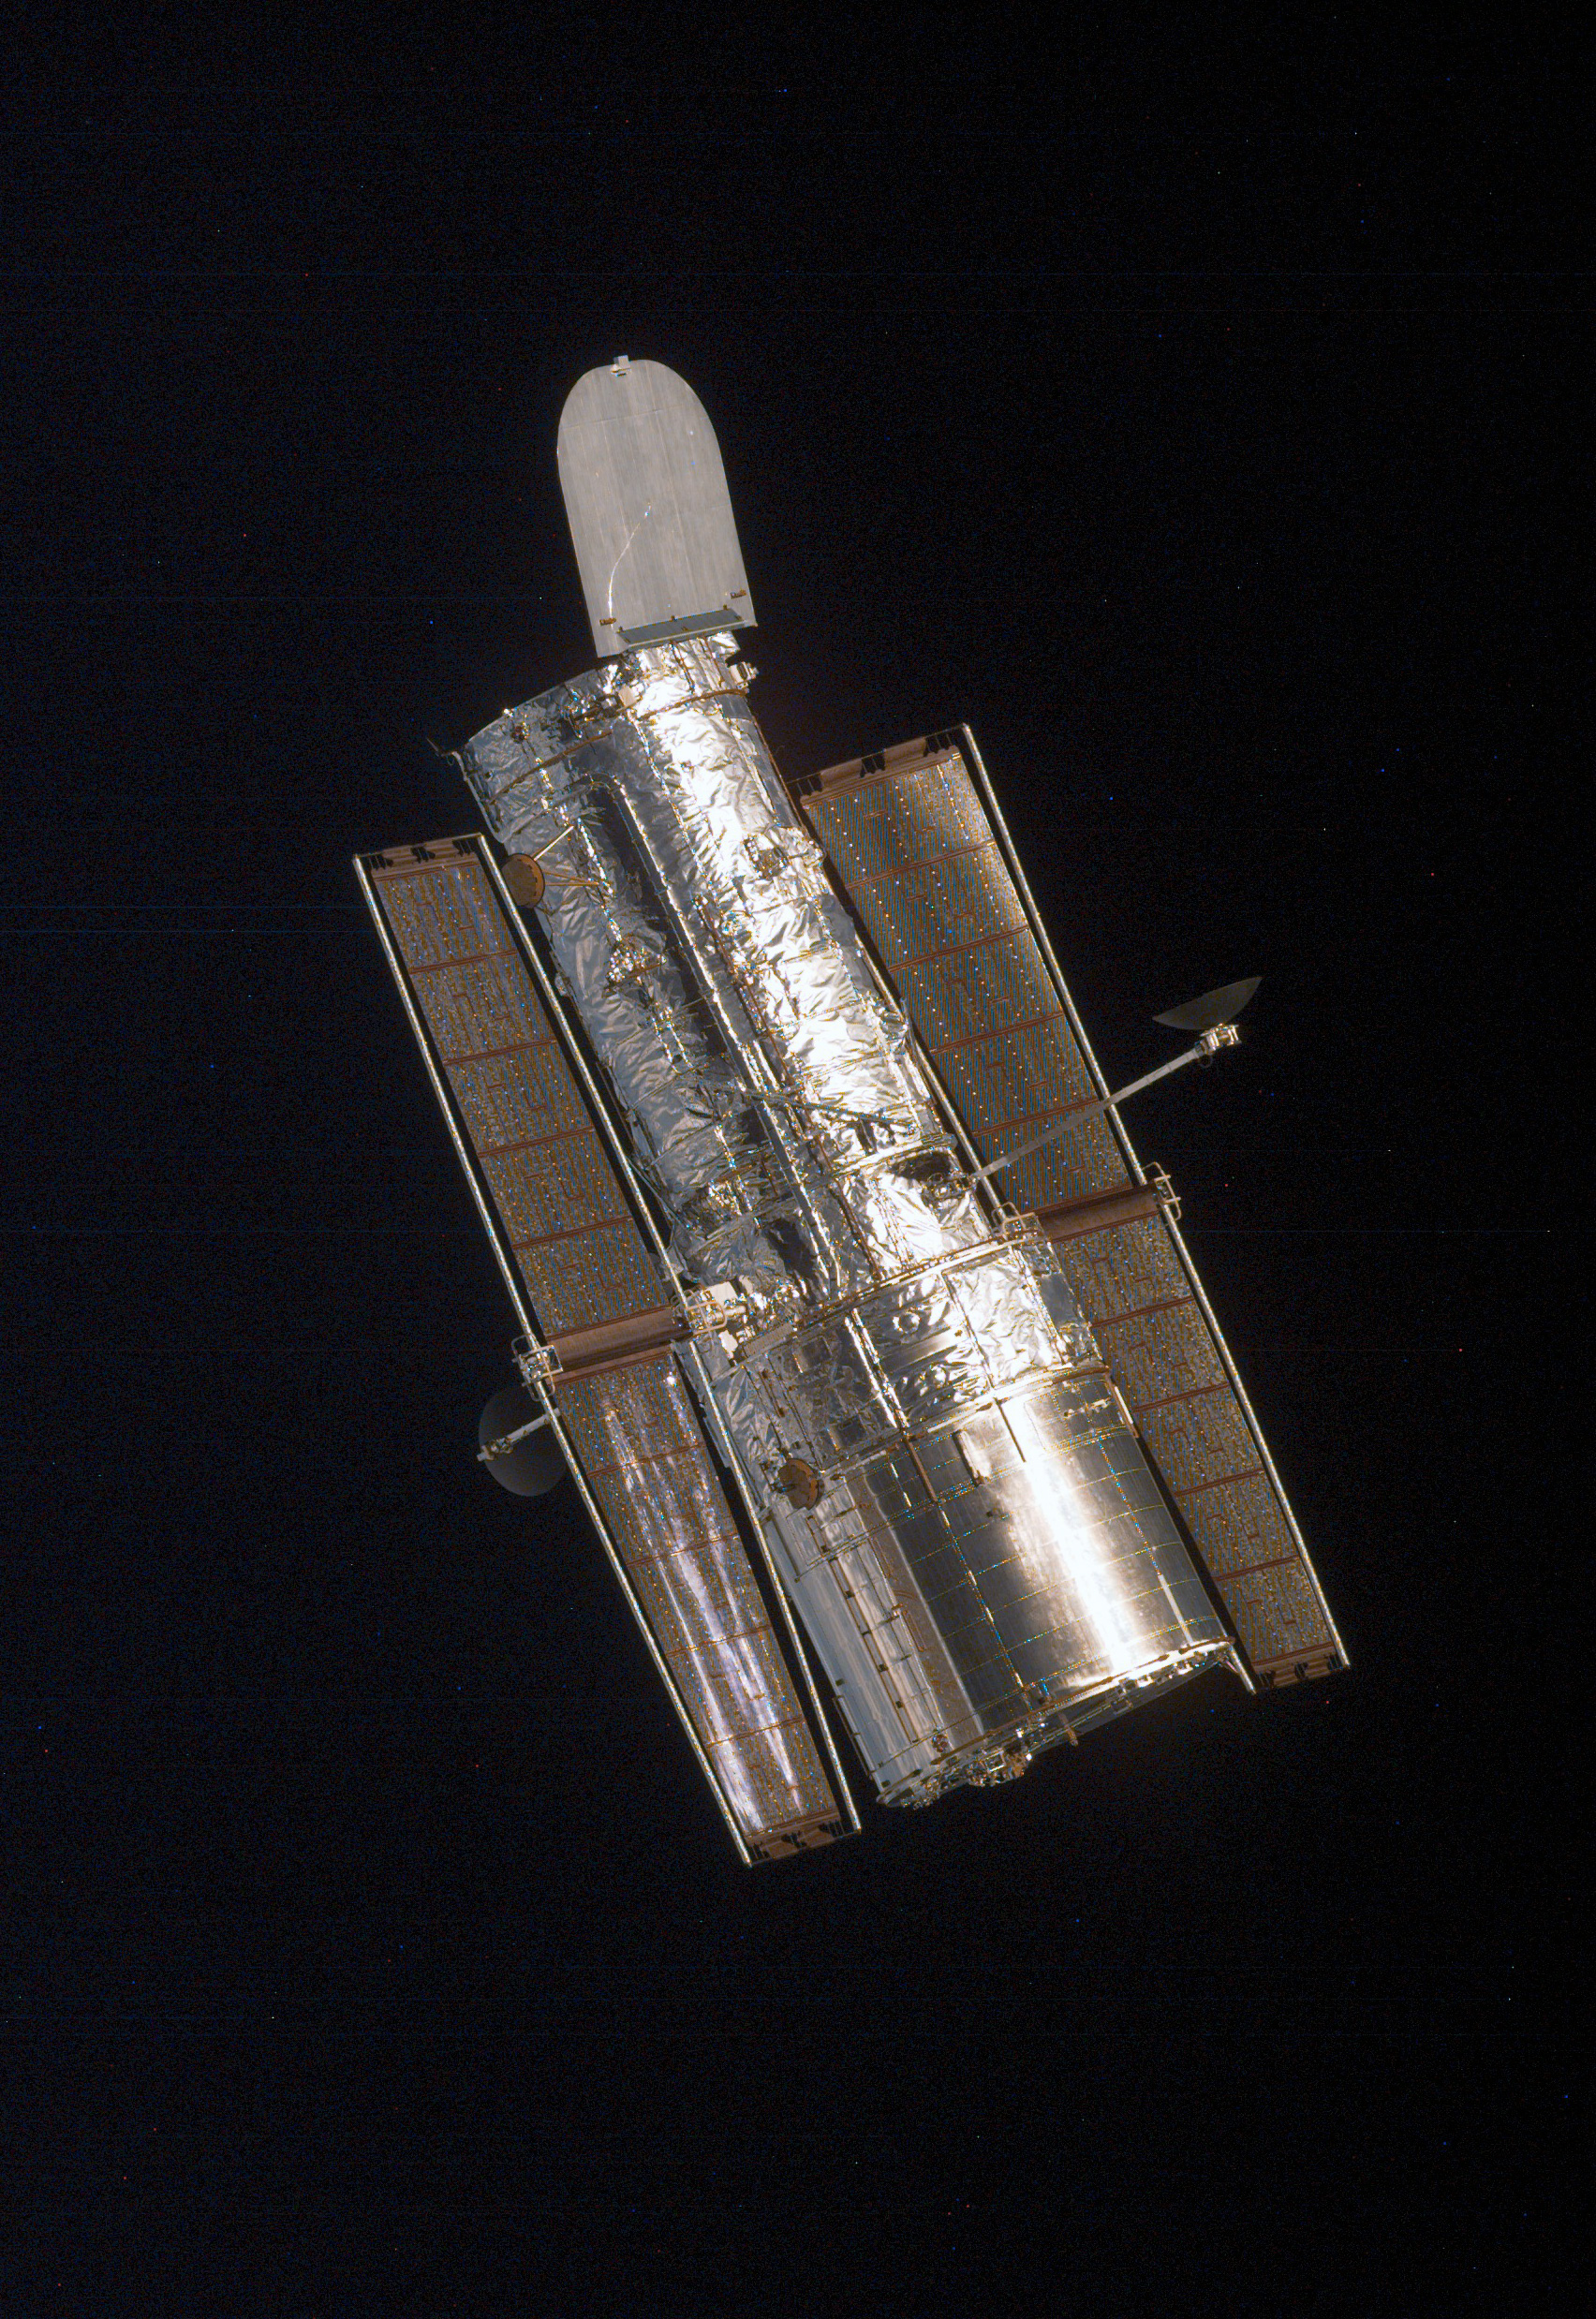

SM3A: Close-Up View of Hubble

This is a close-up view of the Hubble Space Telescope (HST).

Credit: NASA/ESA